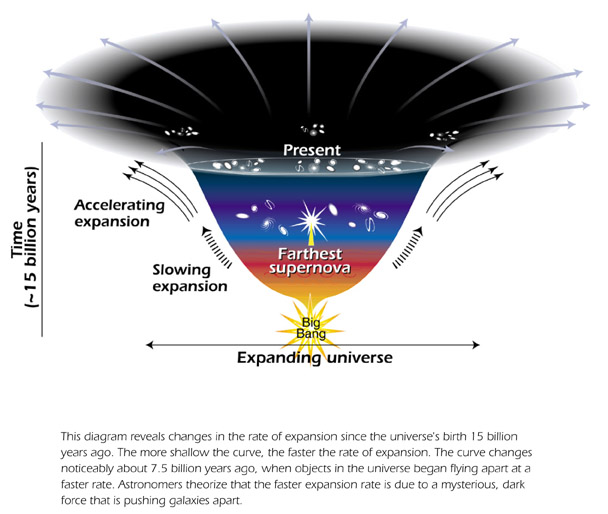

Model of expanding Universe

This diagram reveals changes in the rate of expansion since the Universe's birth 15 billion years ago. The more shallow the curve, the faster the expansion.

Credit: Ann Feild (STScI)